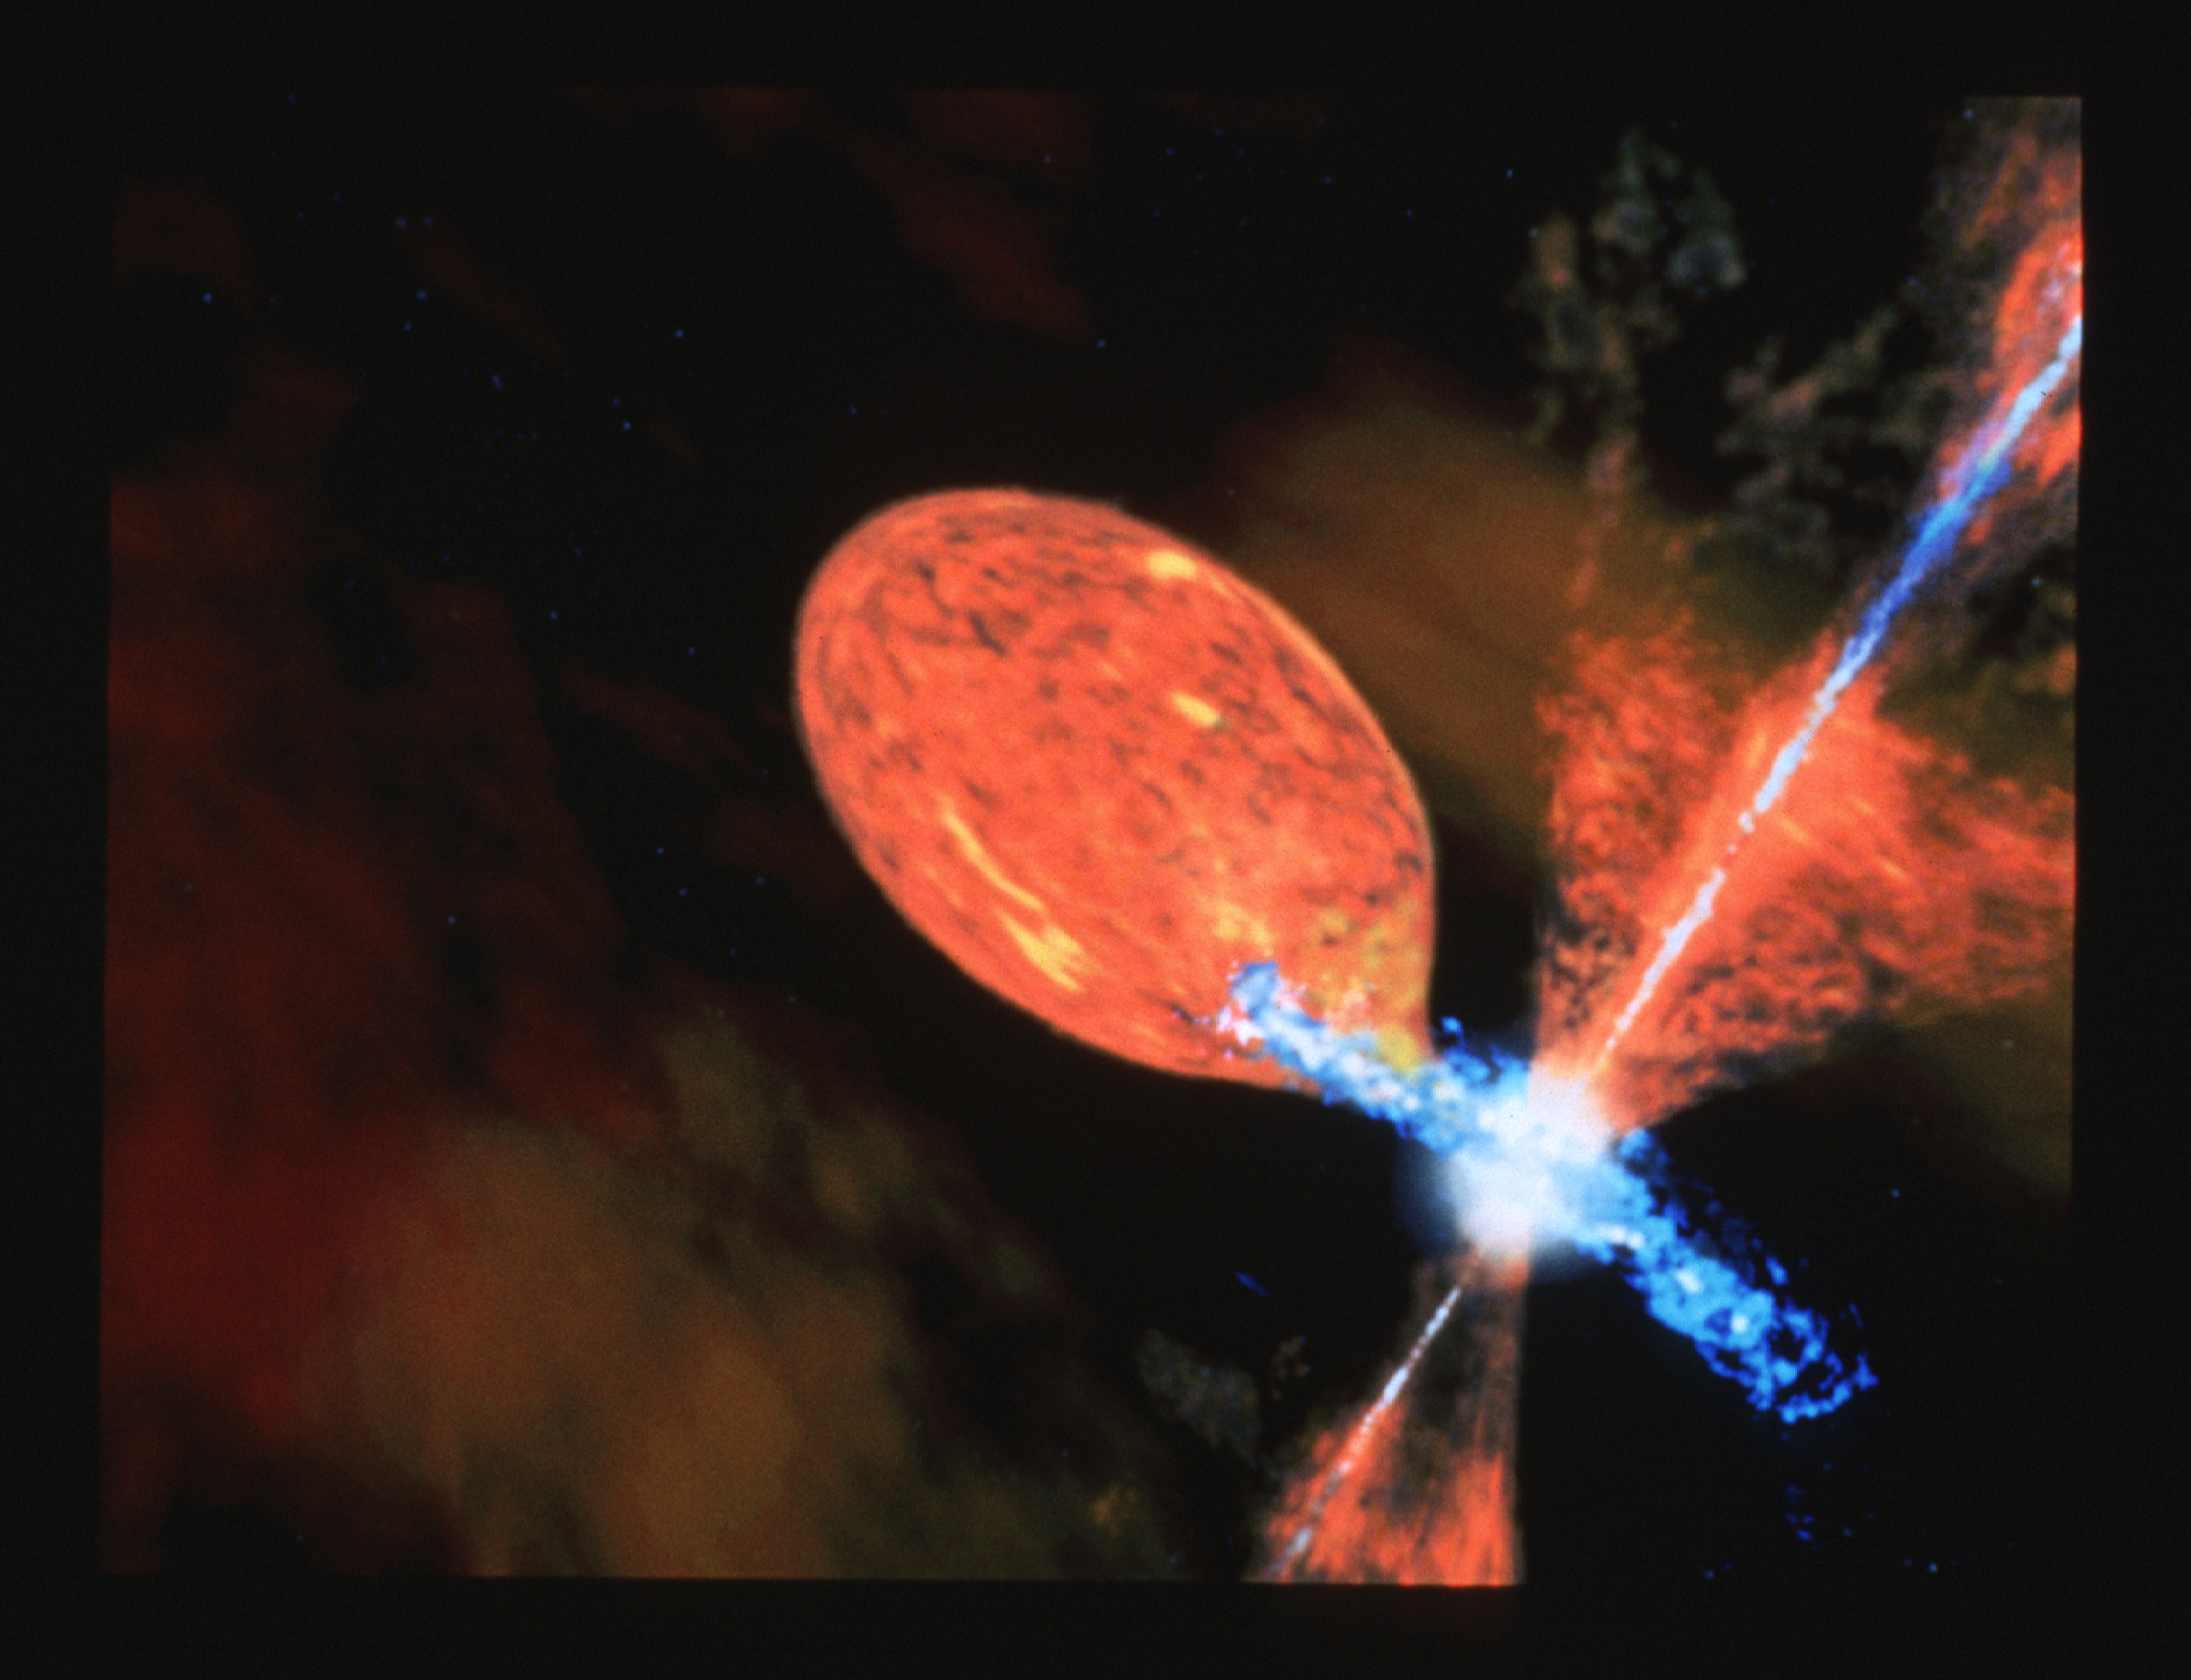

Symbiotic star R Aquarii (artist's impression)

This illustration depicts one possible explanation for R Aquariiàs semi-periodic outbursts. The peculiar behavior of R. Aquarii suggests that the red giant star in the R Aquarii system may spill some of its mass onto the companion - a common mechanism proposed for most nova-like outbursts. The mass transfer process may form an accretion disk: a swirling, flattened vortex of hot gasses that spiral down onto the hot companion. The disk may periodically erupt when the companion becomes overloaded with in-falling material. These explosions may happen only periodically when the white dwarf orbits close enough to pull in material from the staràs outer layer.

Credit: Dana Berry (STScI)